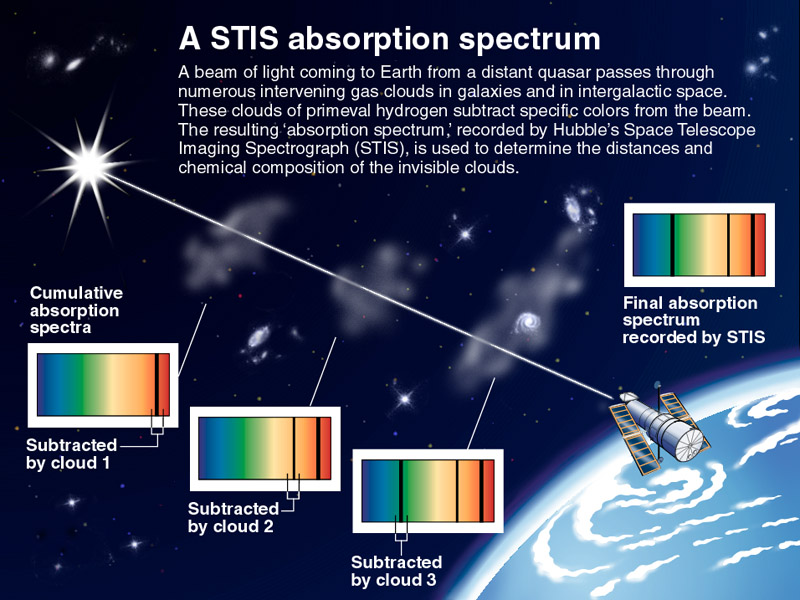

A STIS absorption spectrum

A beam of light coming to Earth from a distant quasar passes through numerous intervening gas clouds in galaxies and in intergalactic space. These clouds of primeval hydrogen subtract specific colours from the beam. The resulting 'absorption spectrum, ' recorded by Hubbles Space Telescope Imaging Spectrograph (STIS) is used to determine the distances and chemical composition of the invisible clouds.

Credit: NASA/ESA